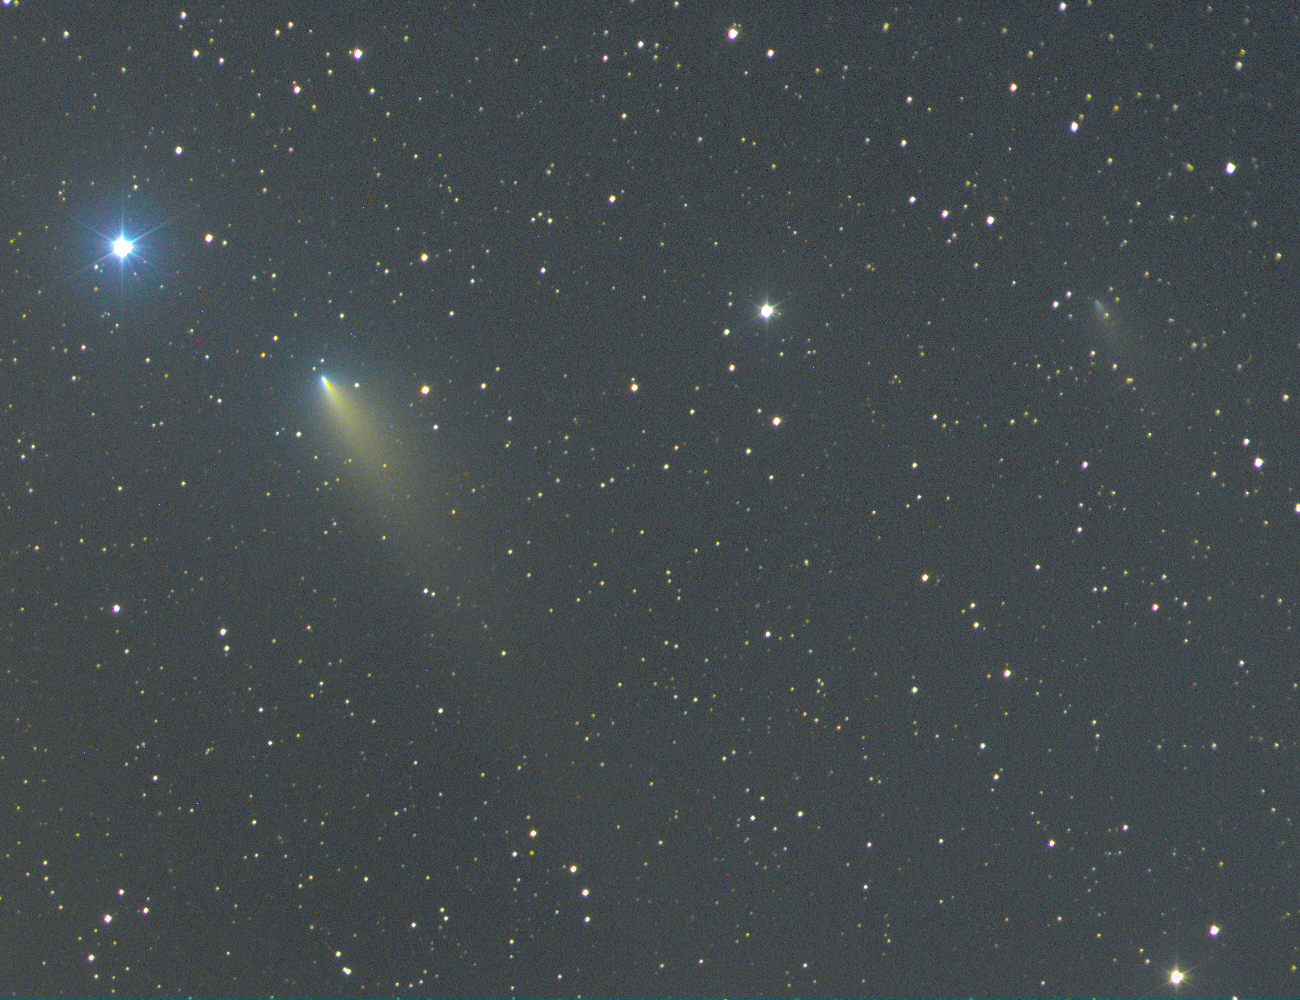

Comet 73P/Schwassmann-Wachmann 3 - fragment B and G [ground-based]

Ground-based colour composite image of Comet 73P/Schwassmann-Wachmann 3 fragments B and G on April 21, 2006 made with an 8" f/1.5 Schmidt camera.

Credit: M. Jäger and G. Rhemann